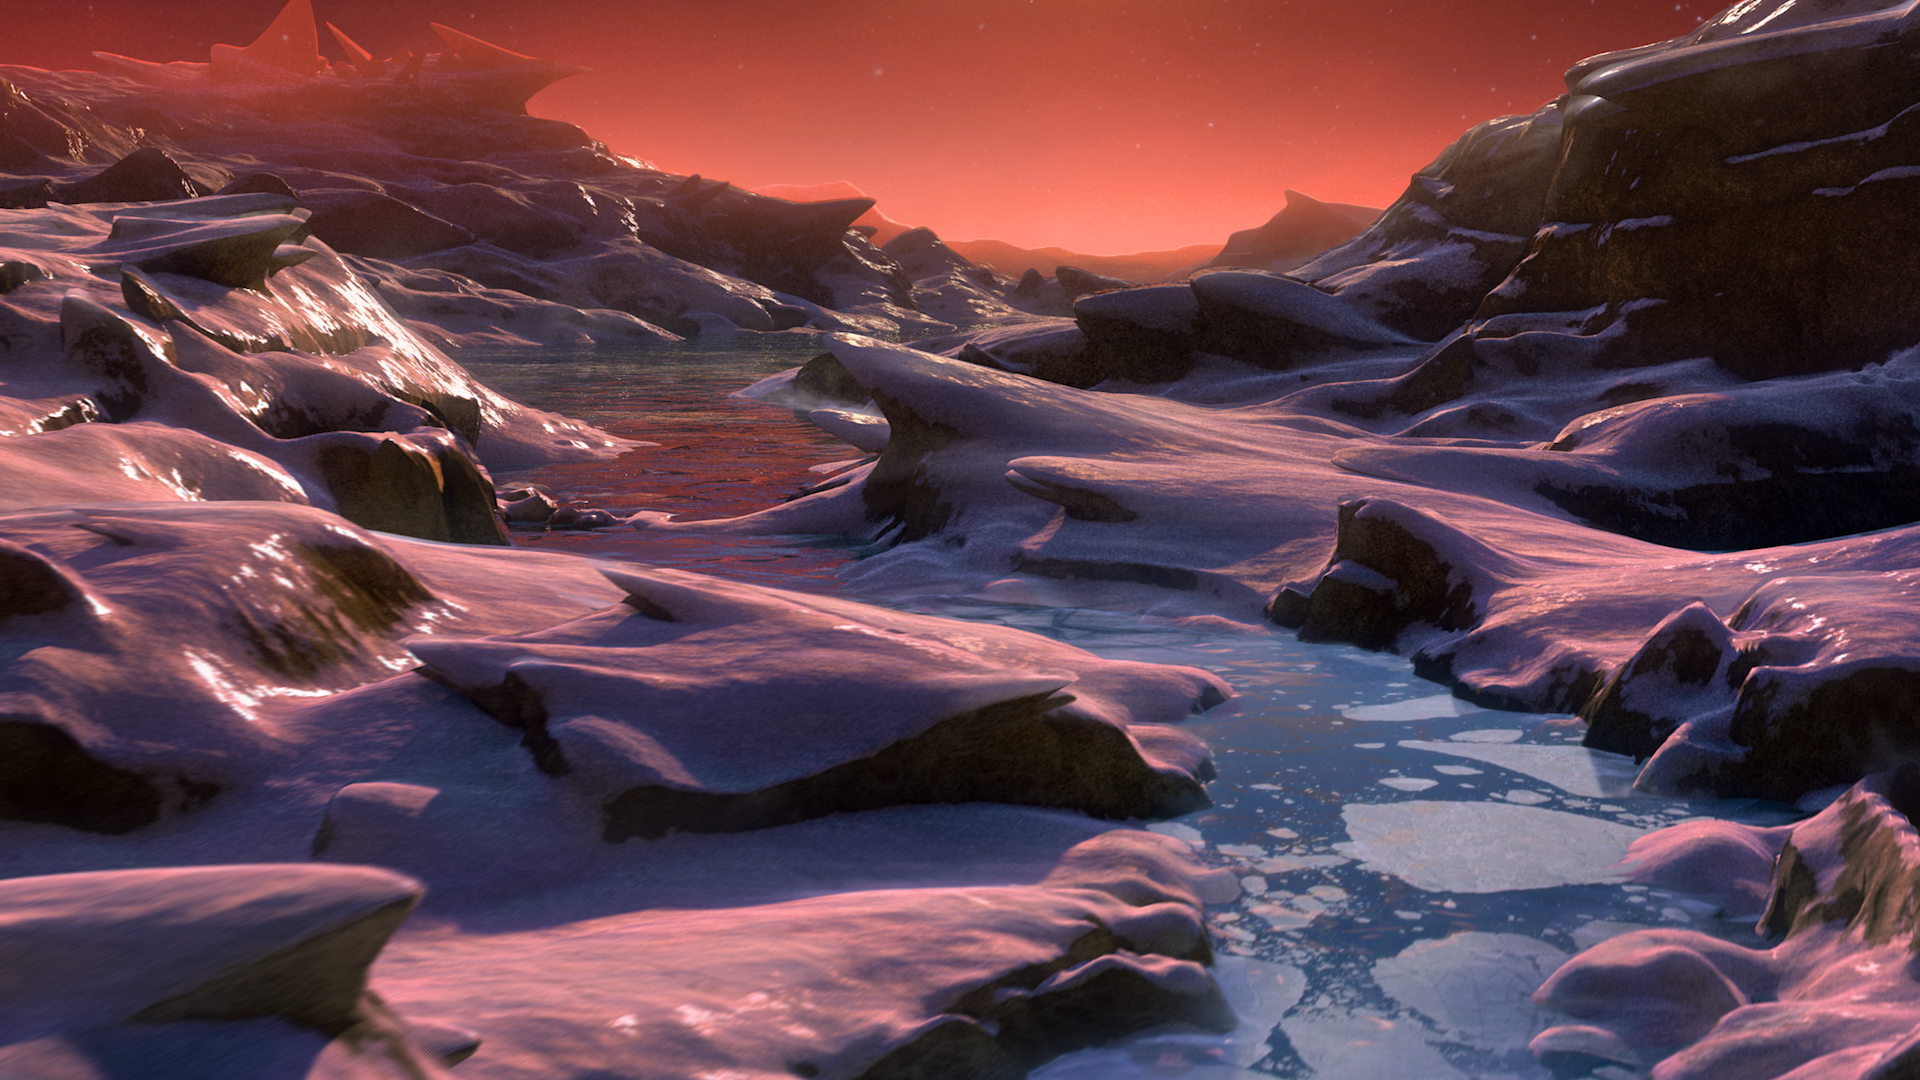

Still from Hubblecast 97: Hubble, exoplanets and the hunt for life

This is a still from Hubblecast 97.

Credit: NASA & ESA